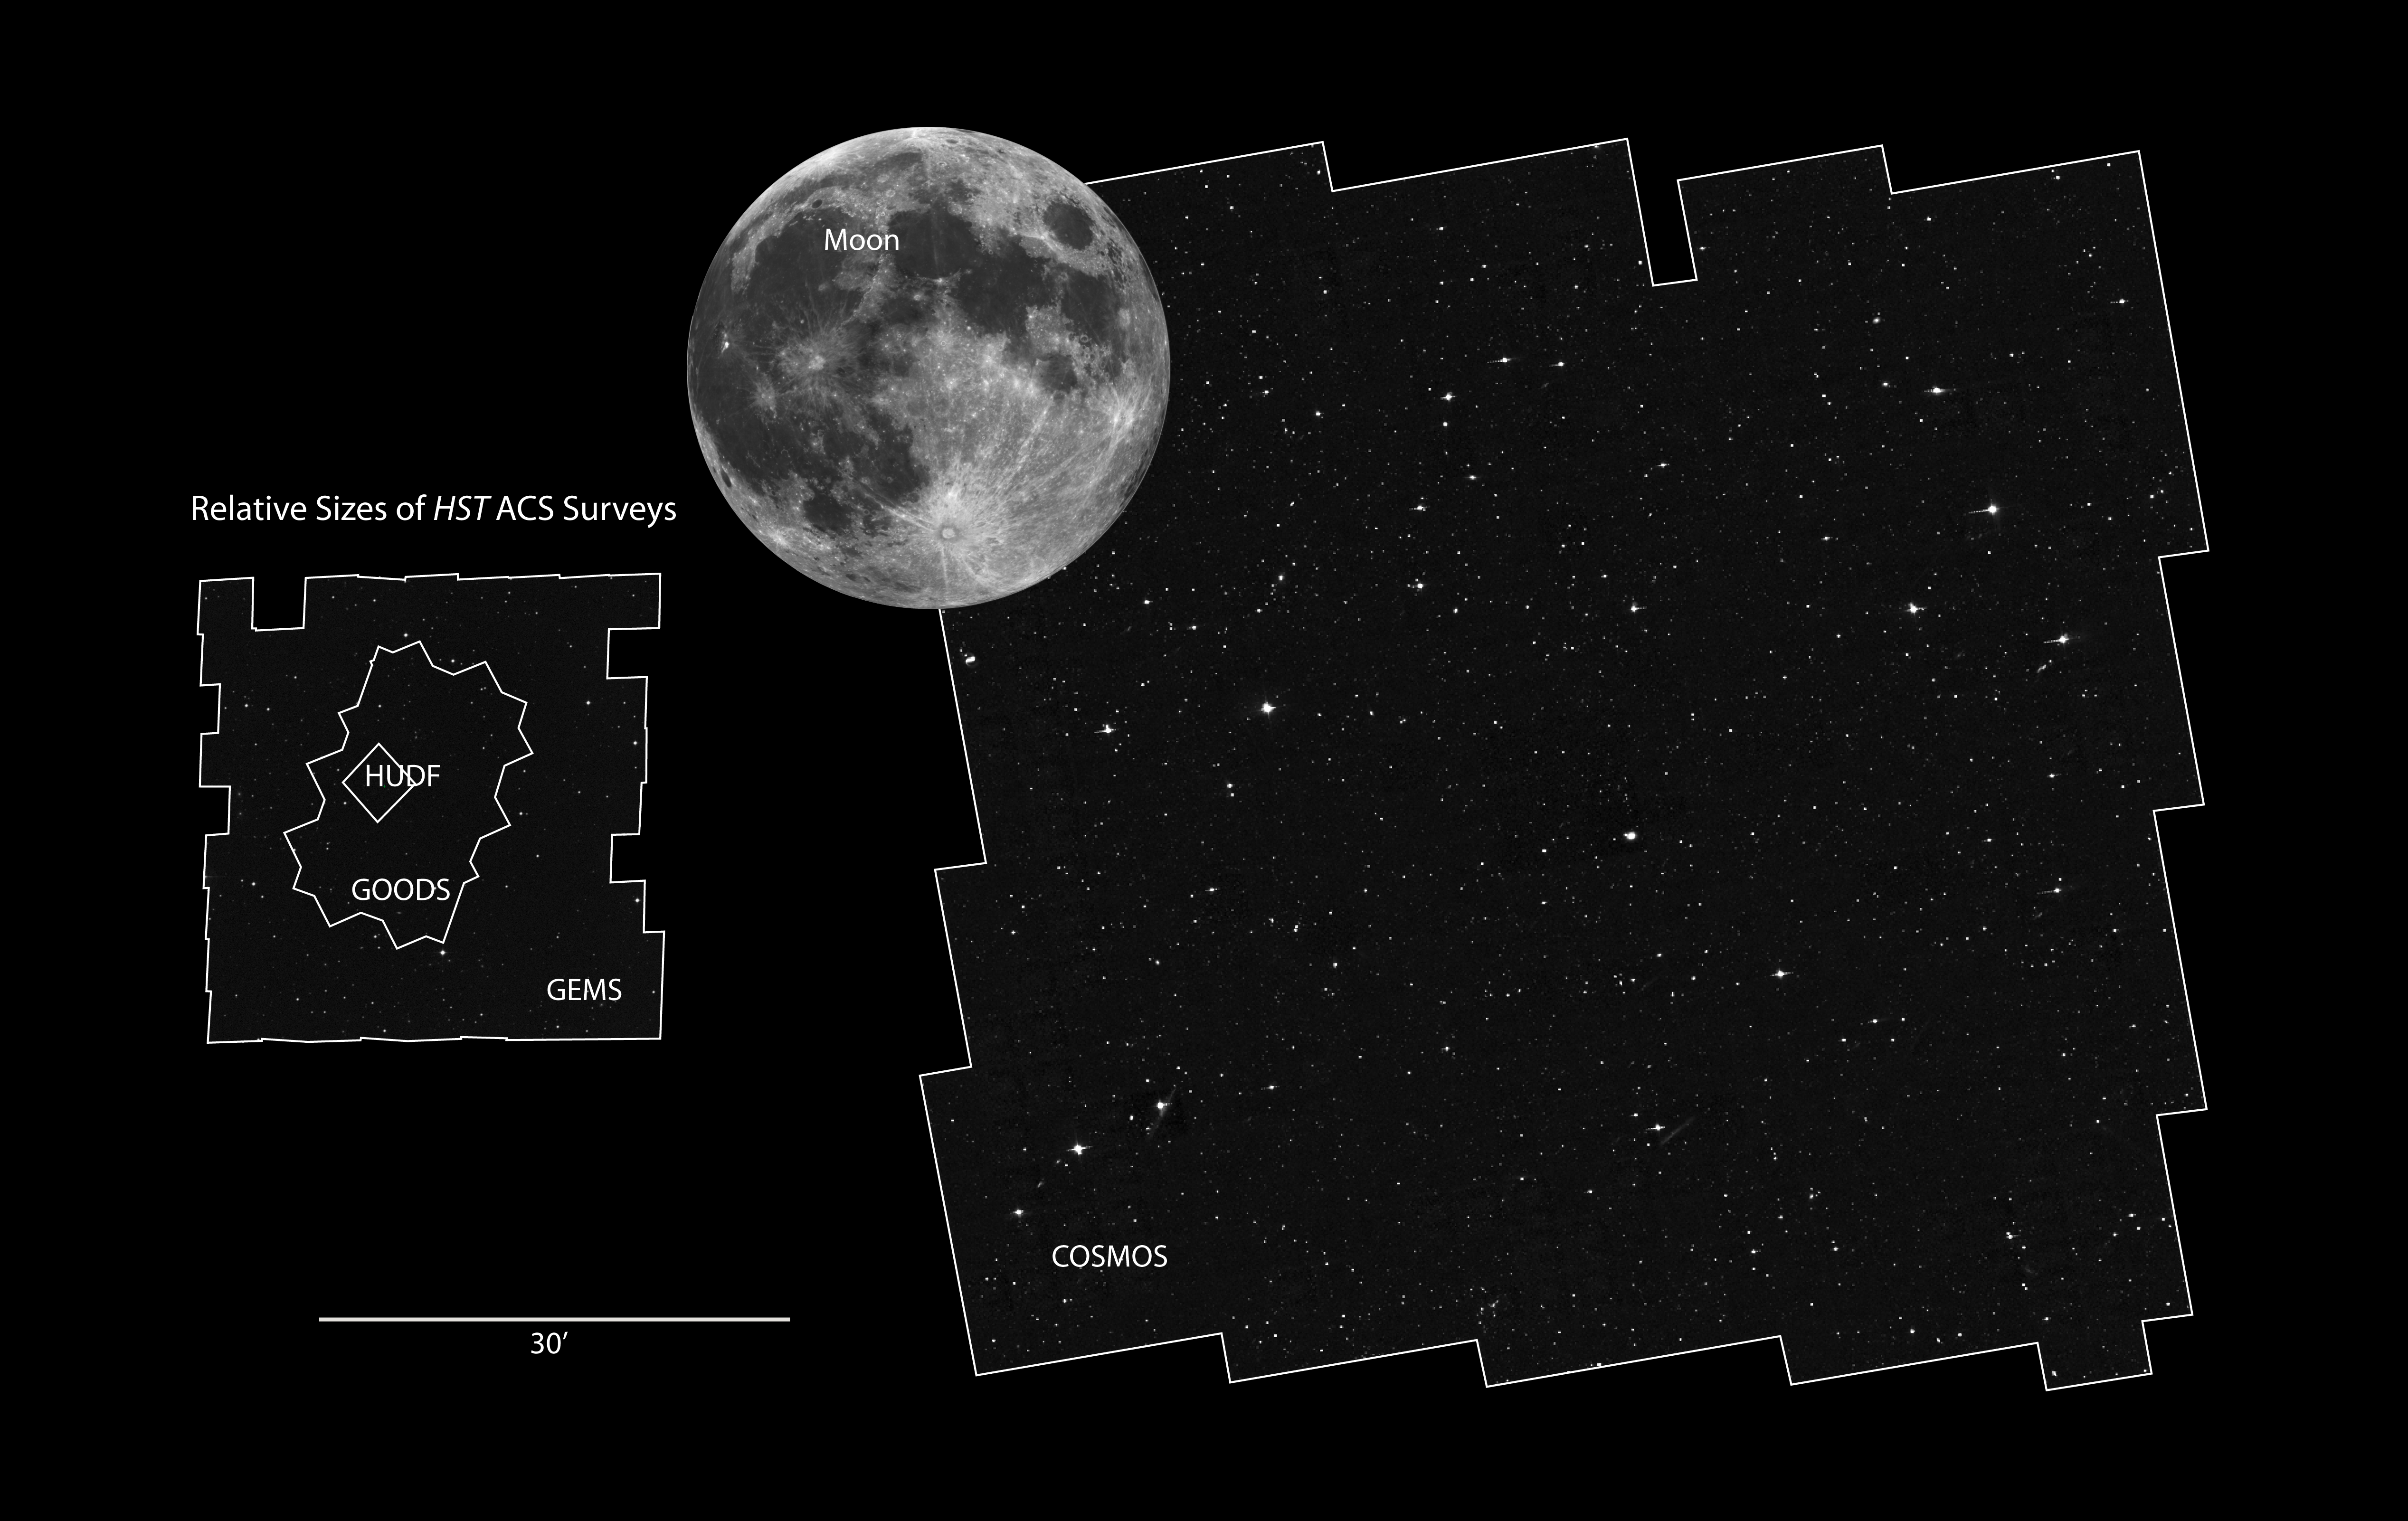

COSMOS field compared to other Hubble surveys

The Hubble Space Telescope has a narrow field of view, which is only a fraction of the angular diameter of the Moon. Certain research programs have devoted a substantial amount of Hubble observing time to survey comparatively larger areas of sky to address a wide range of galaxy evolution and cosmological questions. This is accomplished by assembling mosaic images taken with Hubble's cameras. These surveys constrain the star formation history of the universe, probing the faintest galaxies and tracking the origin, structure, and merger history of galaxies as they evolve.

[Right] - COSMOS

The Cosmological Evolution Survey (COSMOS) is the largest Hubble mosaic of the sky. It covers two square degrees of sky. By comparison, the Earth's moon is one-half degree across. The survey detected over 2 million galaxies spanning 75 percent of the age of the Universe. The field is being imaged by most major space-based and ground-based telescopes.

[Left] - Several survey fields are shown for comparison.

GEMS
Galaxy Evolution from Morphology and Spectral Energy Distributions (GEMS) imaged an area of 900 square minutes of arc on the sky with the Hubble Space Telescope's Advanced Camera for Surveys. This contiguous field is centred on the Chandra Deep Field South, a deep X-ray telescope survey of the universe. GEMS contains roughly 10,000 galaxies down to a depth of 24th magnitude.

GOODS
The Great Observatories Origins Deep Survey (GOODS) unites extremely deep observations from Hubble with NASA's other space observatories (the Spitzer Space Telescope and the Chandra X-ray Observatory, and the XMM-Newton telescope), as well as observations by the most powerful ground-based telescopes. GOODS covers a total of roughly 320 square arc minutes.

HUDF
The Hubble Ultra Deep Field is humankind's farthest view into to the Universe in visible light, uncovering several thousand galaxies down to 31st magnitude. The field of view is one Hubble Advanced Camera for Surveys wide field frame.

Credit: NASA, ESA and Z. Levay (STScI)